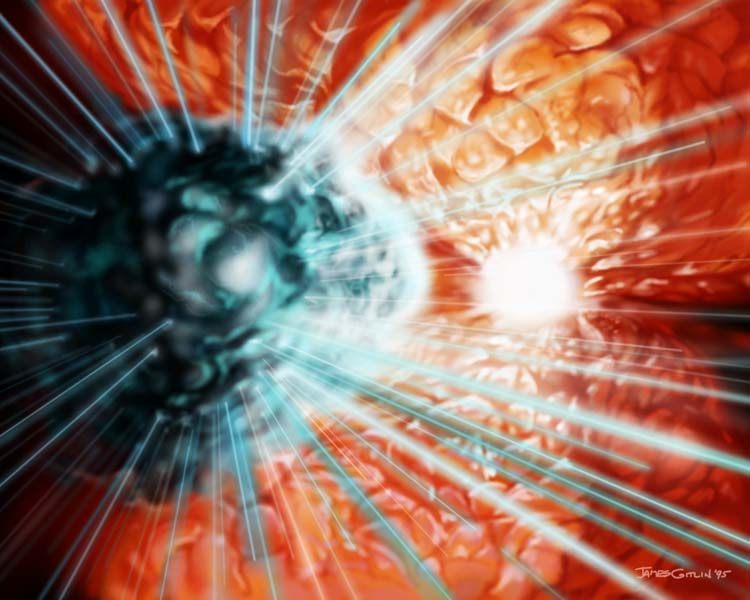

Gas Cloud near Eta Carinae (artist's impression)

This is an artist's concept of a gas cloud (left) that acts as a natural ultraviolet laser, near the huge, unstable star Eta Carinae (right) -- one of most massive and energetic stars in our Milky Way Galaxy.

Credit: James Gitlin/STScI